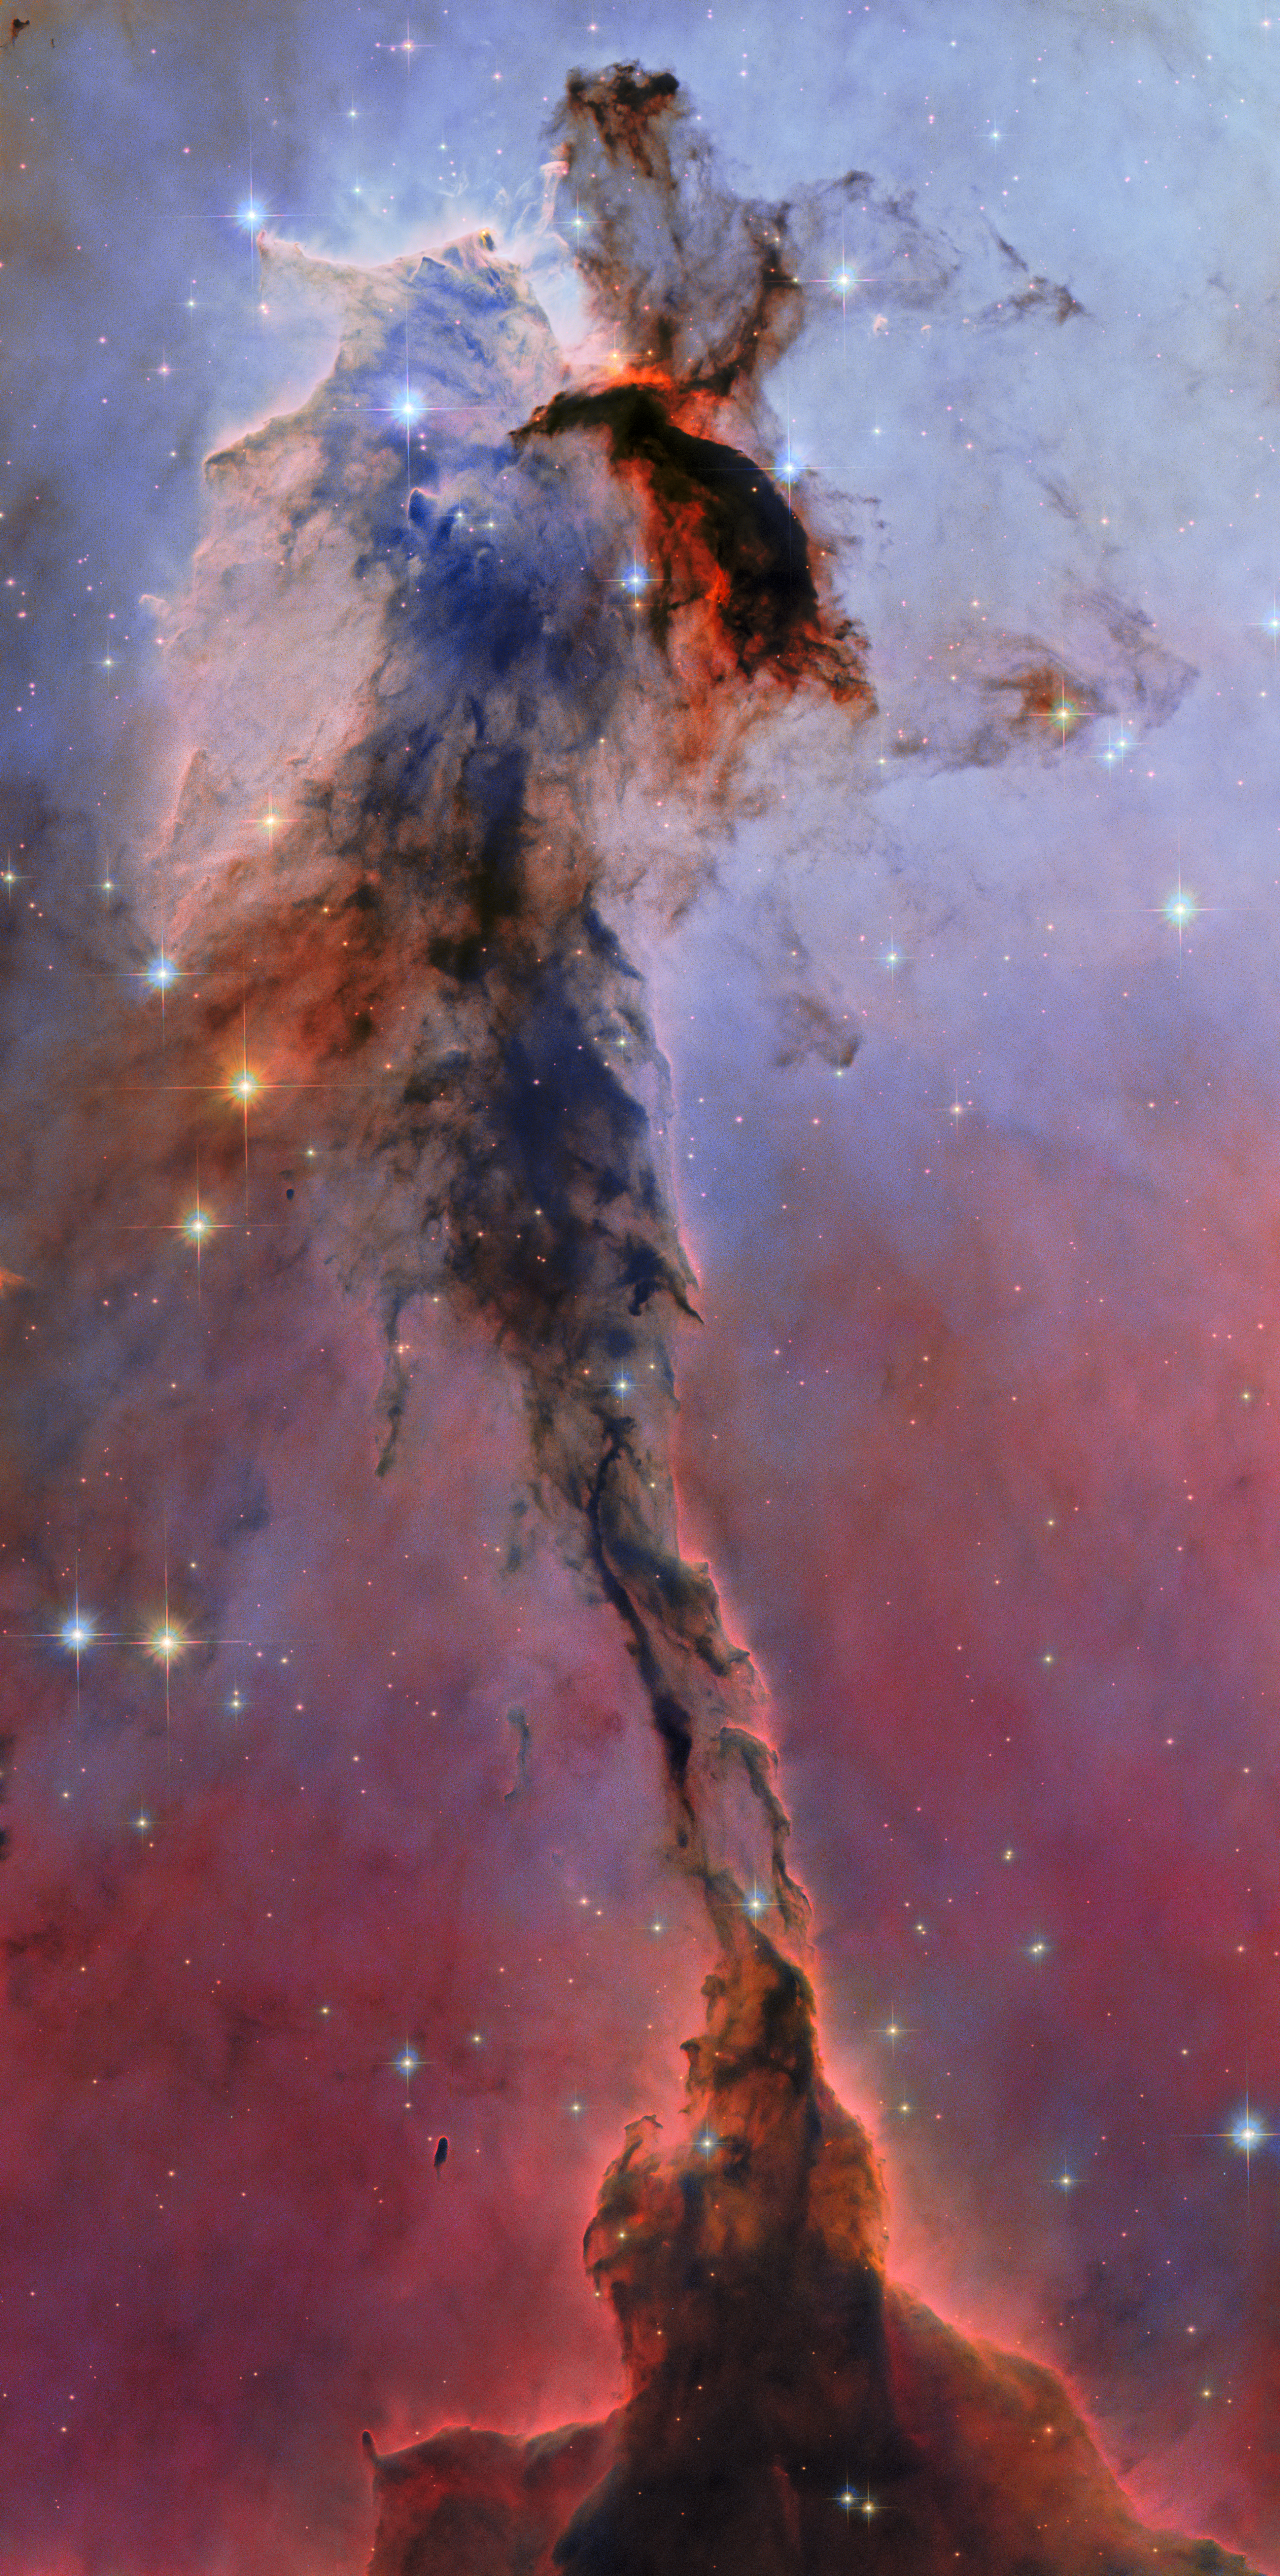

Eagle Nebula

This towering structure of billowing gas and dark, obscuring dust might only be a small portion of the Eagle Nebula, but it is no less majestic in appearance for it. 9.5 light-years tall and 7000 light-years distant from Earth, this dusty sculpture is refreshed with the use of new processing techniques. The new Hubble image is part of ESA/Hubble’s 35th anniversary celebrations.

The cosmic cloud shown here is made of cold hydrogen gas, like the rest of the Eagle Nebula. In such regions of space new stars are born among the collapsing clouds. Hot, energetic and formed in great numbers, the stars unleash an onslaught of ultraviolet light and stellar winds that sculpt the gas clouds around them. This produces fantastical shapes like the narrow pillar with blossoming head that we see here. The material in the pillar is thick and opaque to light; it is highlighted at its edges by the glow of more distant gas behind it. The blue colours of the background are dominated by emission from ionised oxygen; the red colours lower down, glowing hydrogen. Orange colours indicate starlight that has managed to break through the dust: bluer wavelengths are blocked more easily by dust, leaving the redder light to pass through.

The stars responsible for carving this particular structure out of the stellar raw material lie just out of view, at the Eagle Nebula’s centre. As the pressure of their intense radiation batters and compresses the gas in this tower of clouds, it’s possible that further star formation is being ignited within. While the starry pillar has withstood these forces well so far, cutting an impressive shape against the background, eventually it will be totally eroded by the multitude of new stars that form in the Eagle Nebula.

Credit: ESA/Hubble & NASA, K. Noll